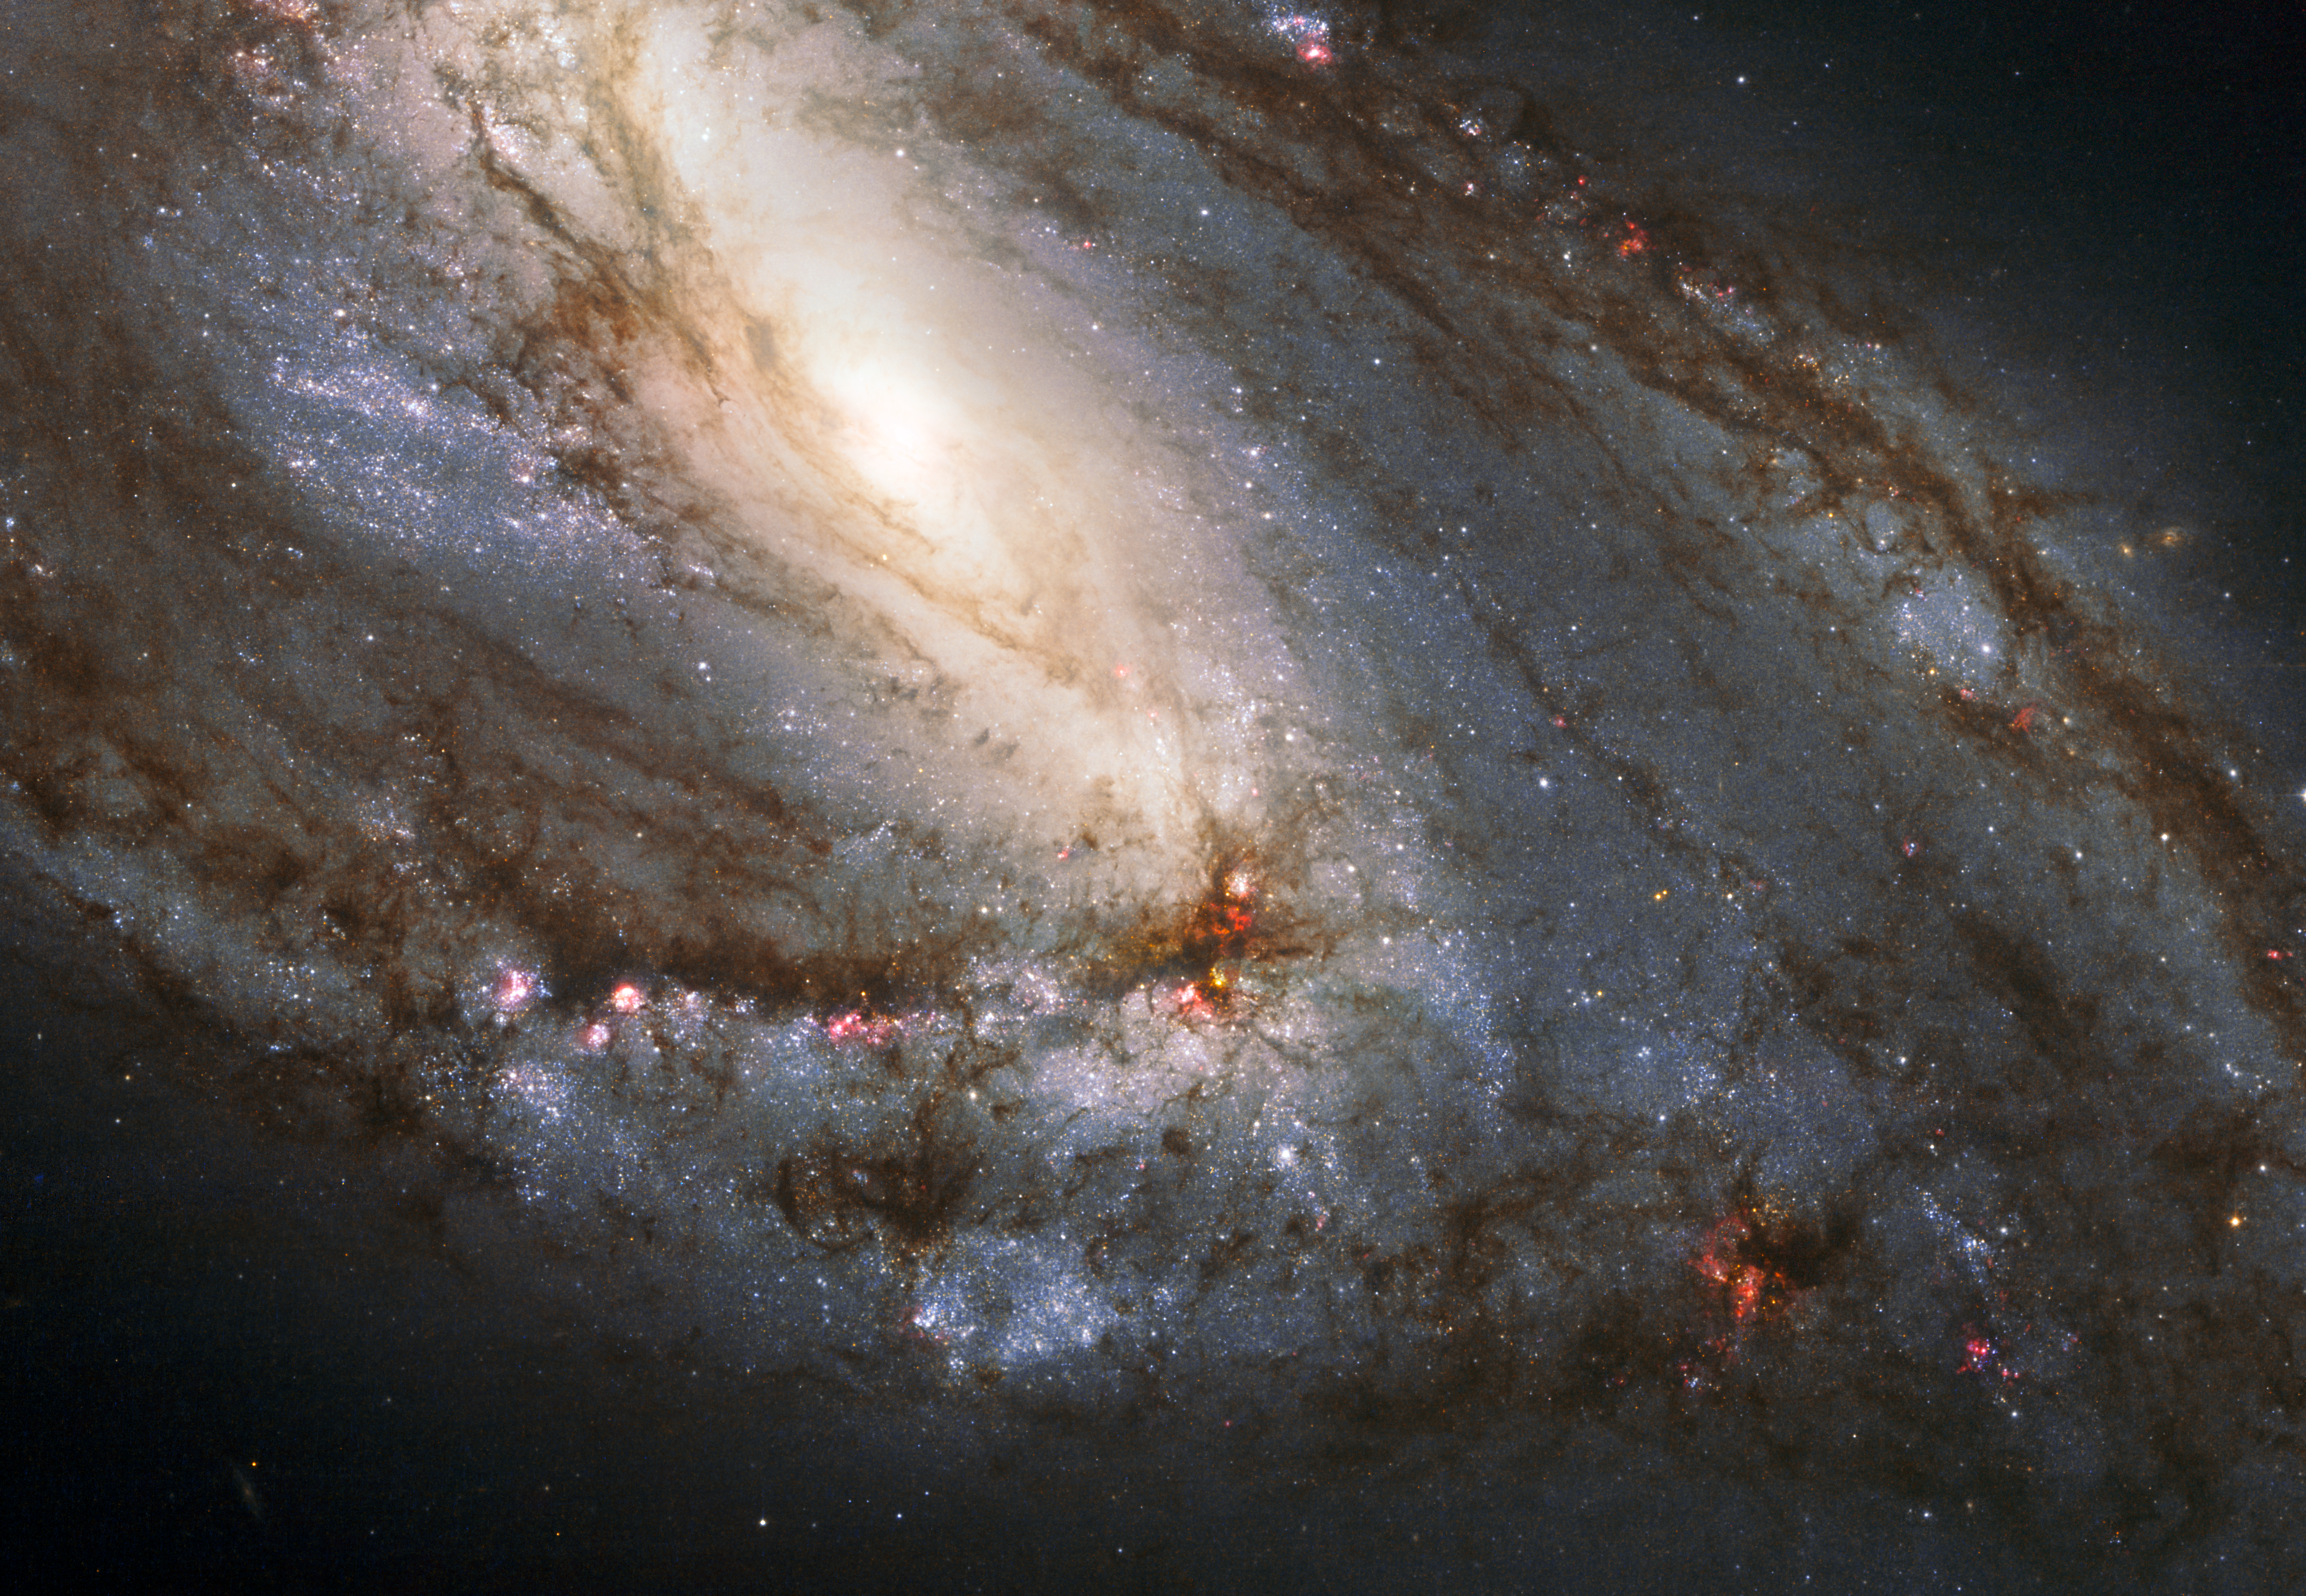

Hubble snaps heavyweight of the Leo Triplet

Hubble has snapped a spectacular view of M 66, the largest "player" of the Leo Triplet, and a galaxy with an unusual anatomy: it displays asymmetric spiral arms and an apparently displaced core. The peculiar anatomy is most likely caused by the gravitational pull of the other two members of the trio.

The unusual spiral galaxy, Messier 66, is located at a distance of about 35 million light-years in the constellation of Leo. Together with Messier 65 and NGC 3628, Messier 66 is the member of the Leo Triplet, a trio of interacting spiral galaxies, part of the larger Messier 66 group. Messier 66 wins in size over its fellow triplets — it is about 100 000 light-years across.

This is a composite of images obtained through the following filters: 814W (near infrared), 555W (green) and H-alpha (showing the glowing of the hydrogen gas). They have been combined so to represent the real colours of the galaxy.

Credit: NASA, ESA and the Hubble Heritage (STScI/AURA)-ESA/Hubble Collaboration. Acknowledgement: Davide De Martin and Robert Gendler